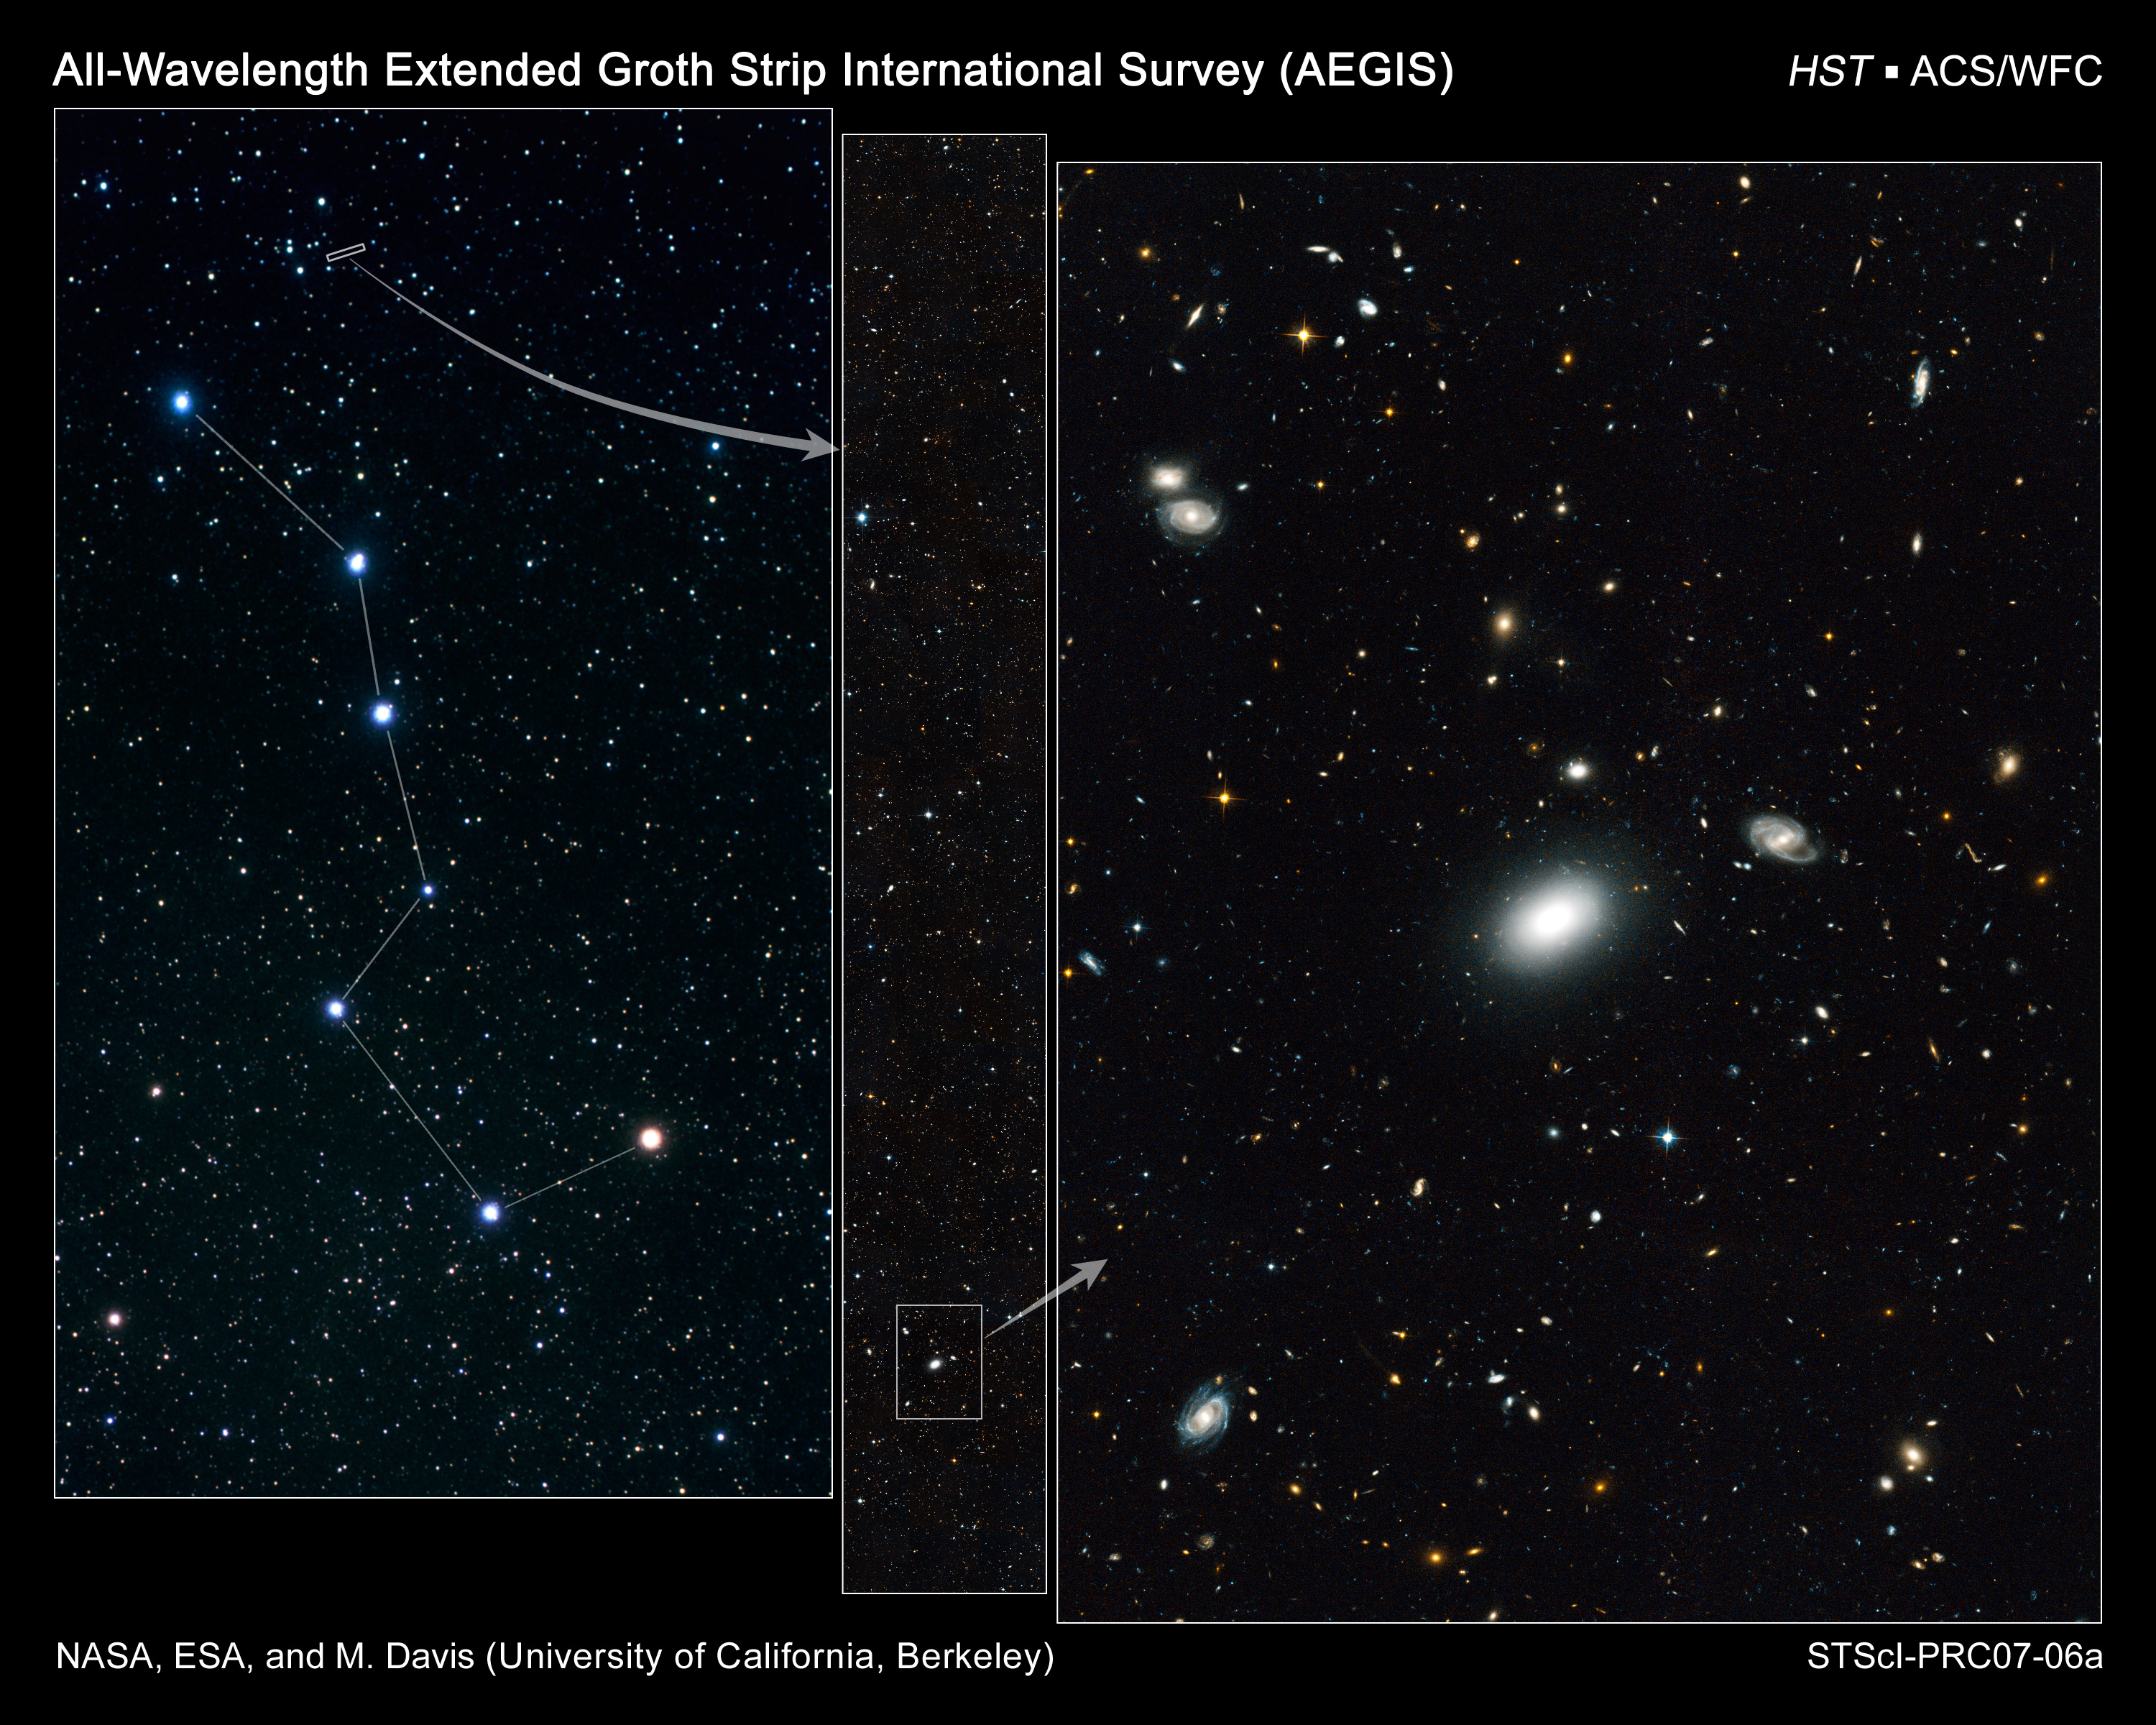

A panoramic view of the sky

A narrow slice of sky near the Big Dipper yielded a goldmine of at least 50,000 galaxies, which were spied by NASA/ESA Hubble Space Telescope. The Hubble view is yielding new clues about the universe's youth, from its "pre-teen" years to young adulthood.

Credit: NASA, ESA, M. Davis (University of California, Berkeley), S. Faber (University of California, Santa Cruz), and A. Koekemoer (STScI)